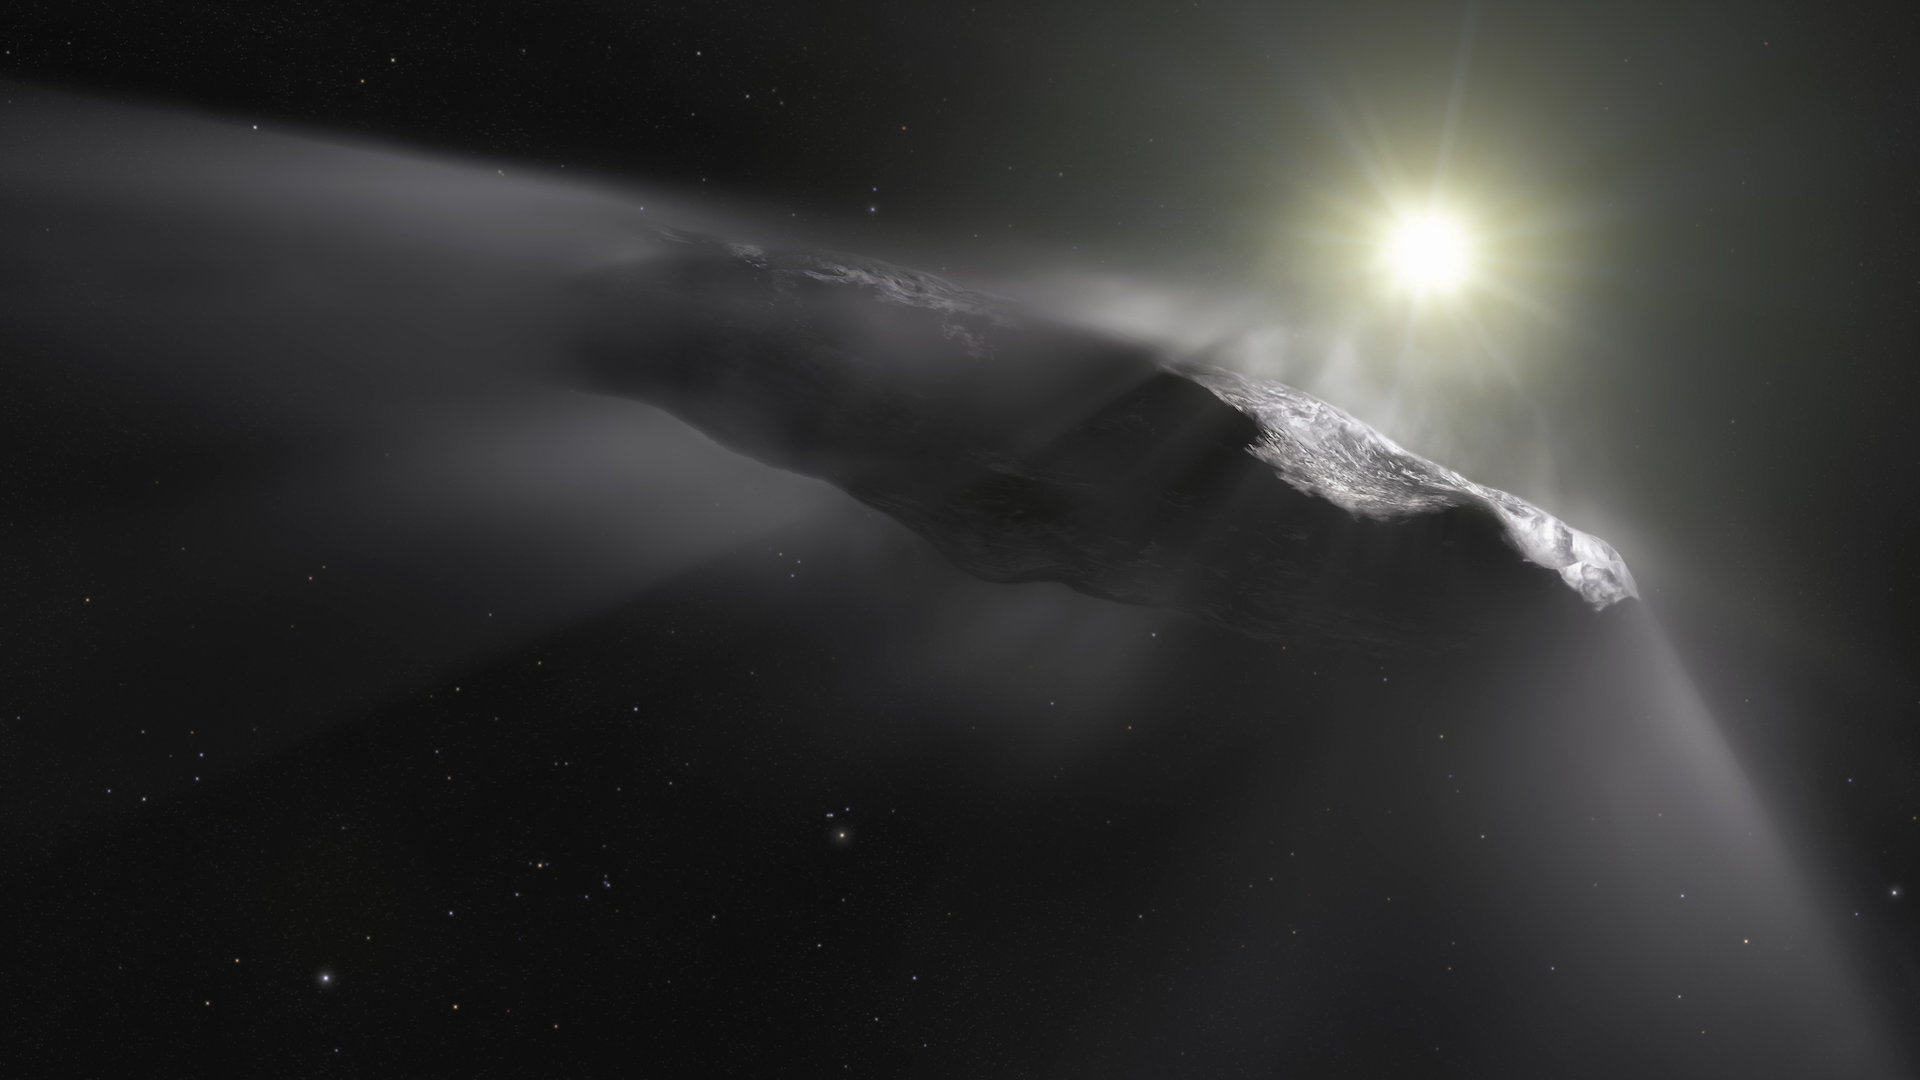

Screenshot of Hubblecast 111

Screenshot of Hubblecast 111.

Credit: NASA & ESA